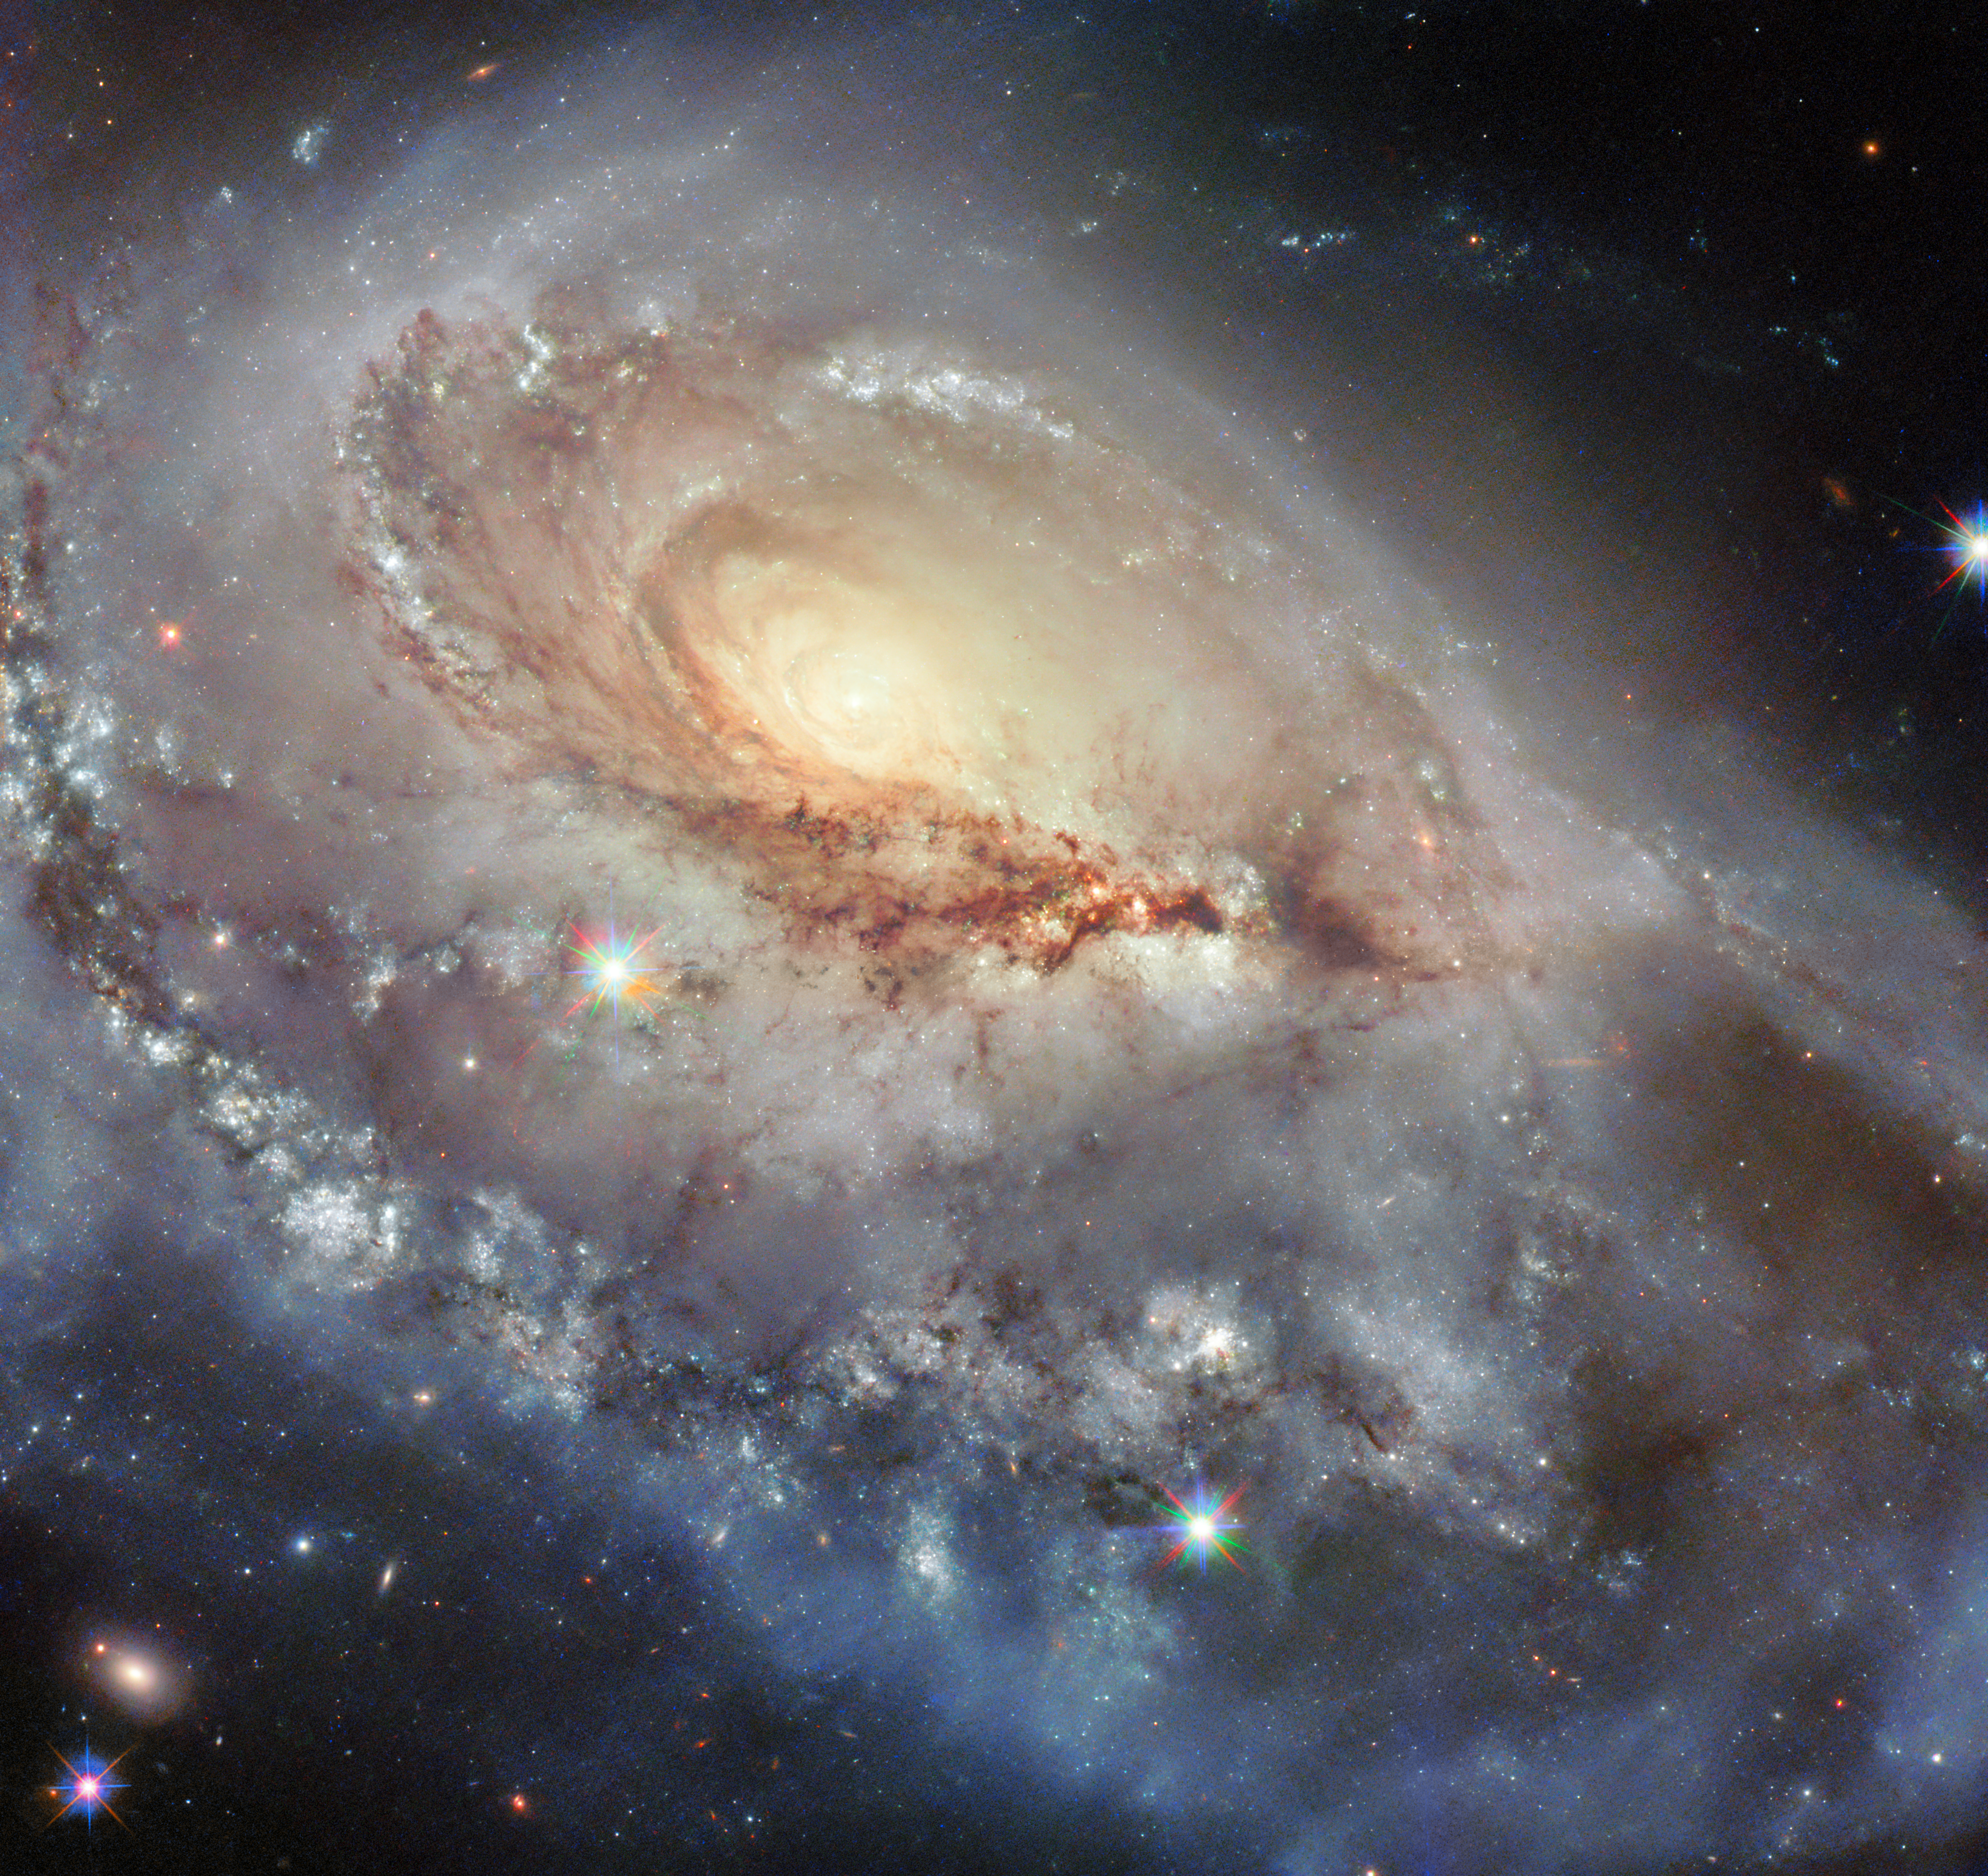

Snapshot of a peculiar spiral

A beautiful but skewed spiral galaxy dazzles in today’s NASA/ESA Hubble Space Telescope Picture of the Week. This galaxy, called Arp 184 or NGC 1961, sits about 190 million light-years away from Earth in the constellation Camelopardalis (The Giraffe).

The name Arp 184 comes from the Atlas of Peculiar Galaxies, which was compiled by astronomer Halton Arp in 1966. The 338 galaxies in the atlas are oddly shaped, tending to be neither entirely elliptical nor entirely spiral-shaped. Many of the galaxies are in the process of interacting with other galaxies, while others are dwarf galaxies without well-defined structures. Arp 184 earned its spot in the catalogue thanks to its single broad, star-speckled spiral arm that appears to stretch toward us. The galaxy’s far side sports a few wisps of gas and stars but lacks a similarly impressive spiral arm.

This Hubble image combines data from three Snapshot observing programmes, which are composed of short observations that can be slotted into time gaps between other proposals. One of the three programmes targeted Arp 184 for its peculiar appearance. This programme surveyed galaxies listed in the Atlas of Peculiar Galaxies as well as A Catalogue of Southern Peculiar Galaxies and Associations, a similar catalogue compiled by Halton Arp and Barry Madore.

The remaining two programmes were designed to check up on the aftermath of fleeting astronomical events like supernovae and tidal disruption events — when a star is ripped apart after wandering too close to a supermassive black hole. Since Arp 184 has hosted four known supernovae in the past three decades, it’s a rich target for a supernova hunt.

Credit: ESA/Hubble & NASA, J. Dalcanton, R. J. Foley (UC Santa Cruz), C. Kilpatrick